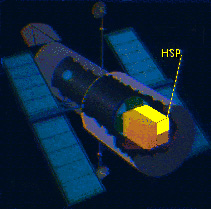

The position of HSP in Hubble's instrument bay.

The High Speed Photometer (HSP) was one of the four original axial instruments on the Hubble. The HSP, which was removed from Hubble during the First Servicing Mission in December 1993, was used to make very rapid (up to 100.000 measurements pr. second) light measurements of astronomical objects at a variety of wavelengths from the near ultraviolet to the visible. It had five detectors.

Credit: ESA/Hubble